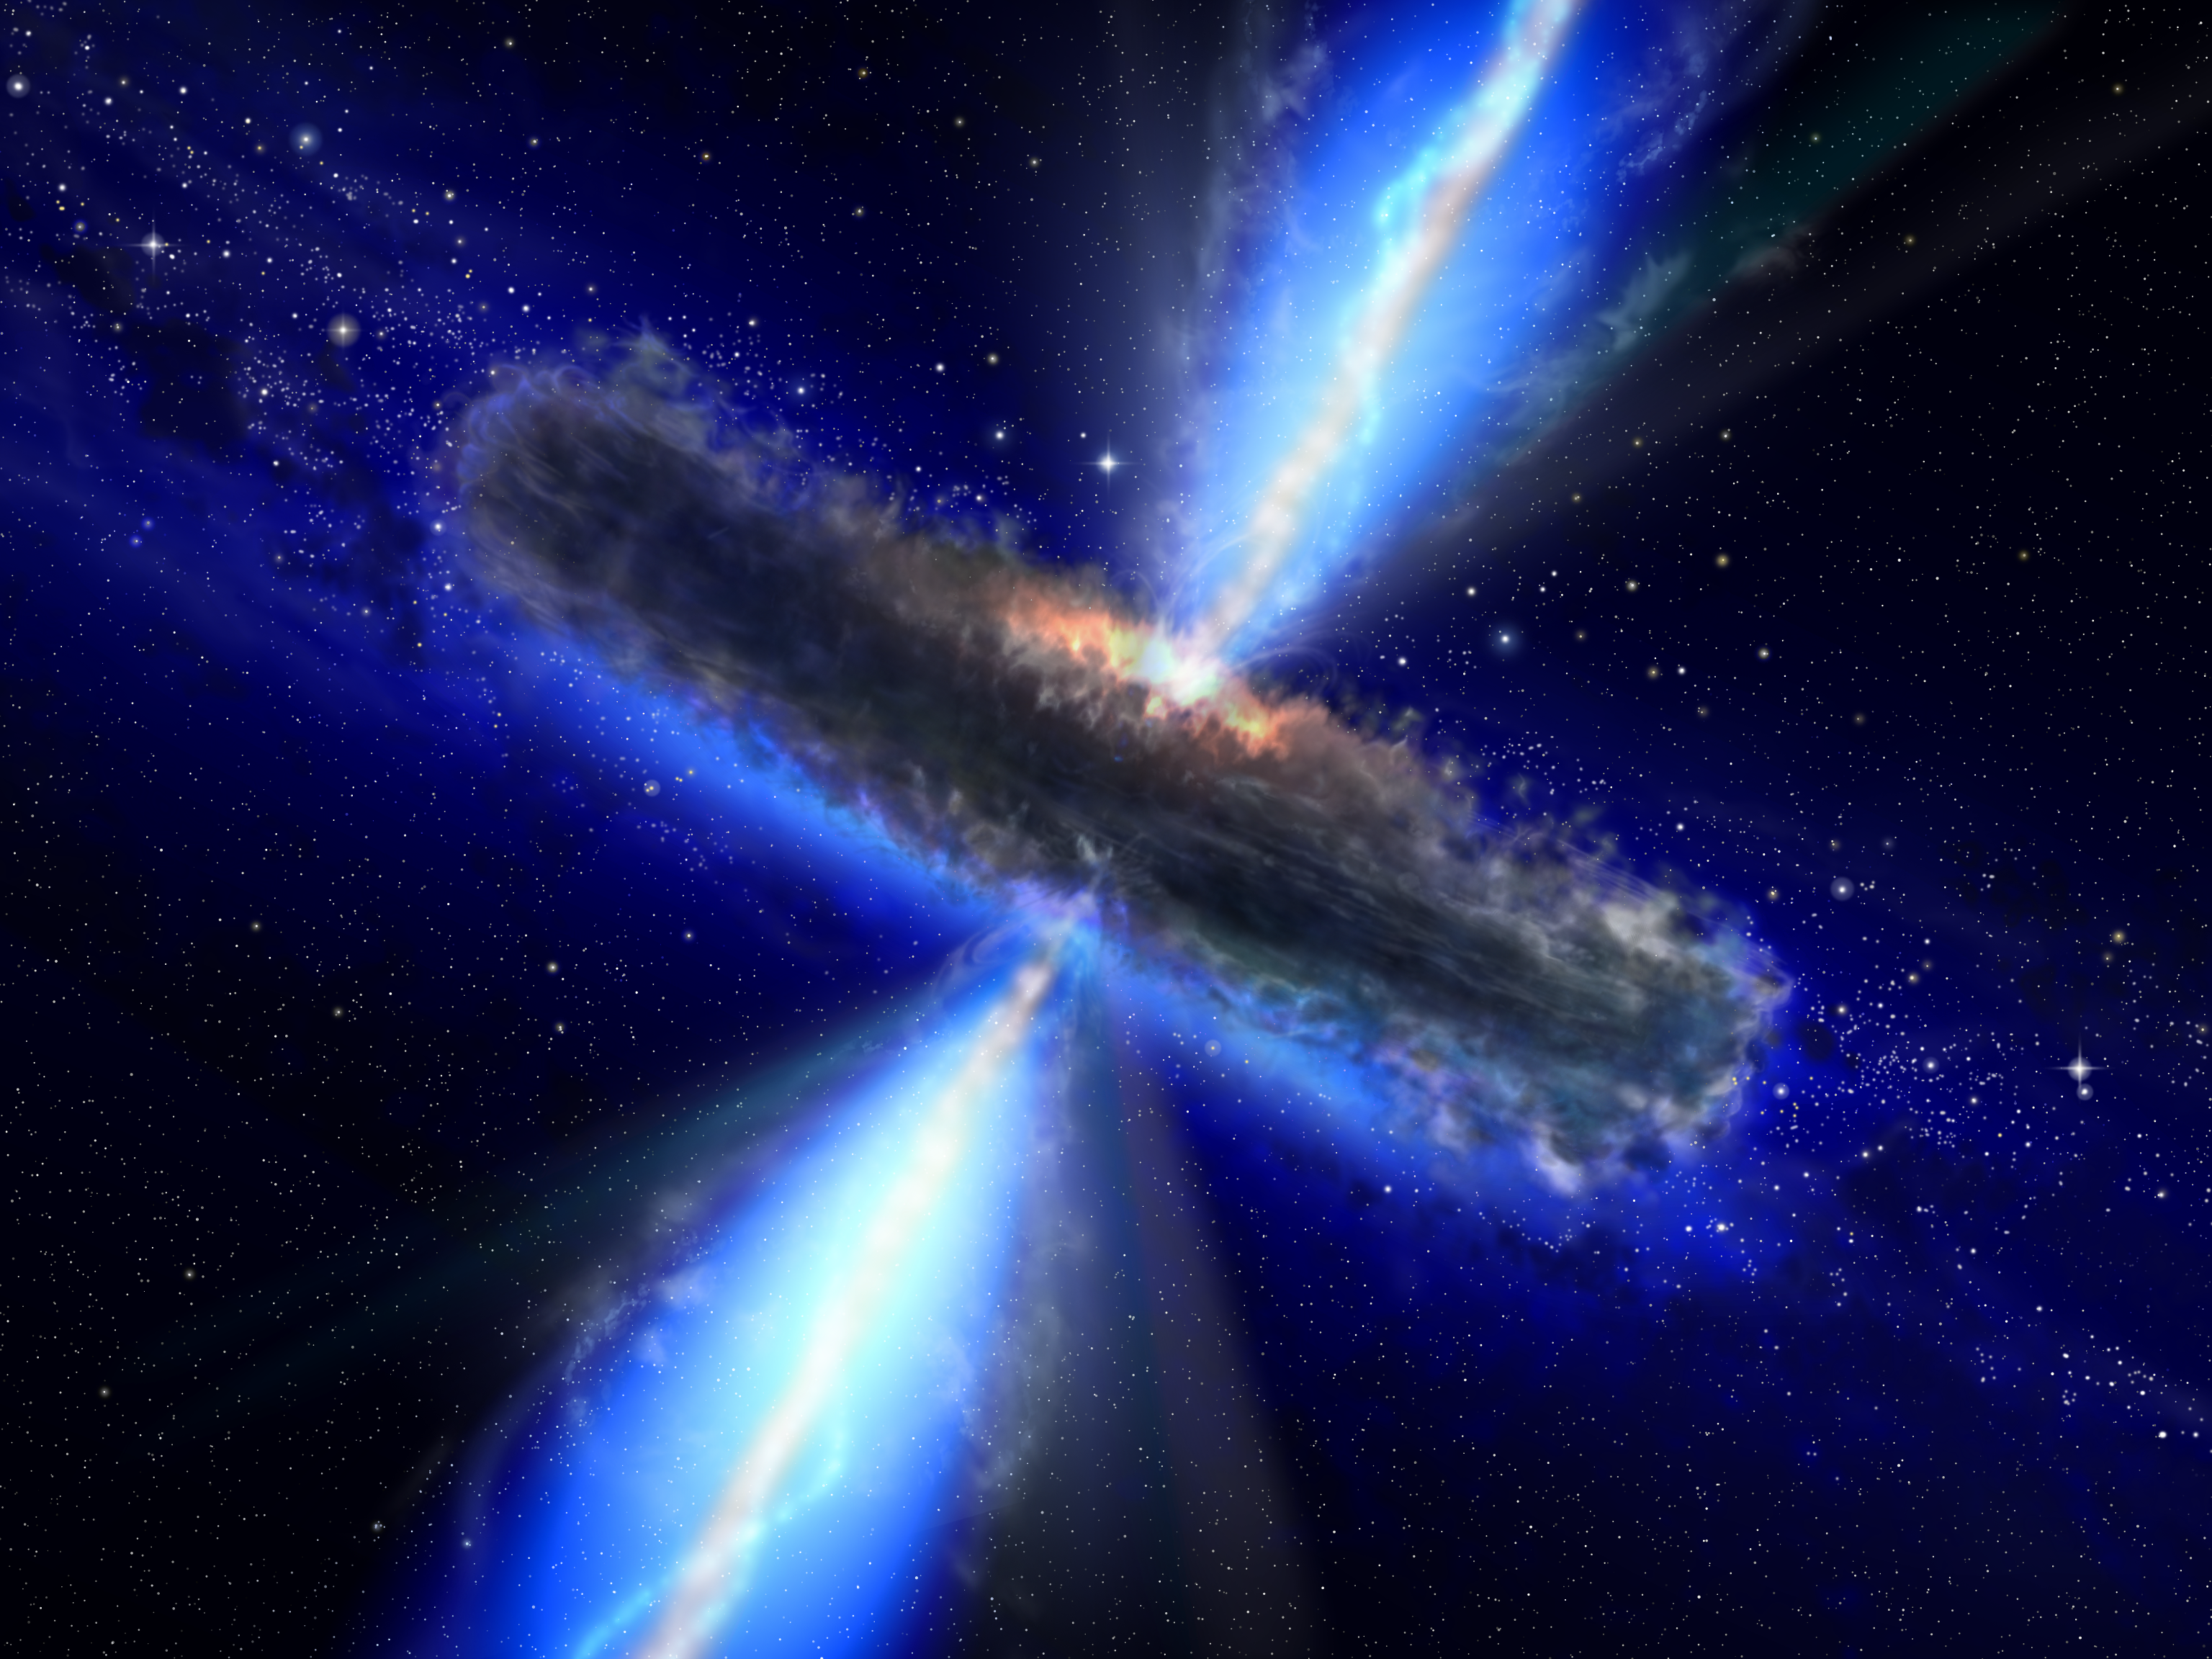

A dust-bound supermassive black hole [artist's impression]

This artist's impression shows the dust torus around a super-massive black hole. Black holes lurk at the centres of active galaxies in environments not unlike those found in violent tornadoes on Earth. Just as in a tornado, where debris is often found spinning about the vortex, so in a black hole, a dust torus surrounds its waist. In some cases astronomers can look along the axis of the dust torus from above or from below and have a clear view of the black hole. Technically these objects are then called "type 1 sources". "Type 2 sources" lie with the dust torus edge-on as viewed from Earth so our view of the black hole is totally blocked by the dust over a range of wavelengths from the near-infrared to soft X-rays.

While many dust-obscured low-power black holes (called "Seyfert 2s") were known, until recently few of their high-power counterparts were known. The identification of a population of high-power obscured black holes and the active galaxies surrounding them has been a key goal for astronomers and will lead to greater understanding and a refinement of the cosmological models describing our Universe.

The European AVO science team led by Paolo Padovani from Space Telescope-European Coordinating Facility and the European Southern Observatory in Munich, Germany, has discovered a whole population of the obscured, powerful supermassive black holes. Thirty of these objects were found in the so-called GOODS (Great Observatories Origins Deep Survey) fields. The GOODS survey consists of two areas that include some of the deepest observations from space- and ground-based telescopes, including the NASA/ESA Hubble Space Telescope, and have become the best studied patches in the sky.

In the illustration the jets coming out of the regions nearest the black hole are also seen. The jets emerge from an area close to the black hole where a disk of accreted material rotates (not seen here).

Credit: ESA/NASA, the AVO project and Paolo Padovani